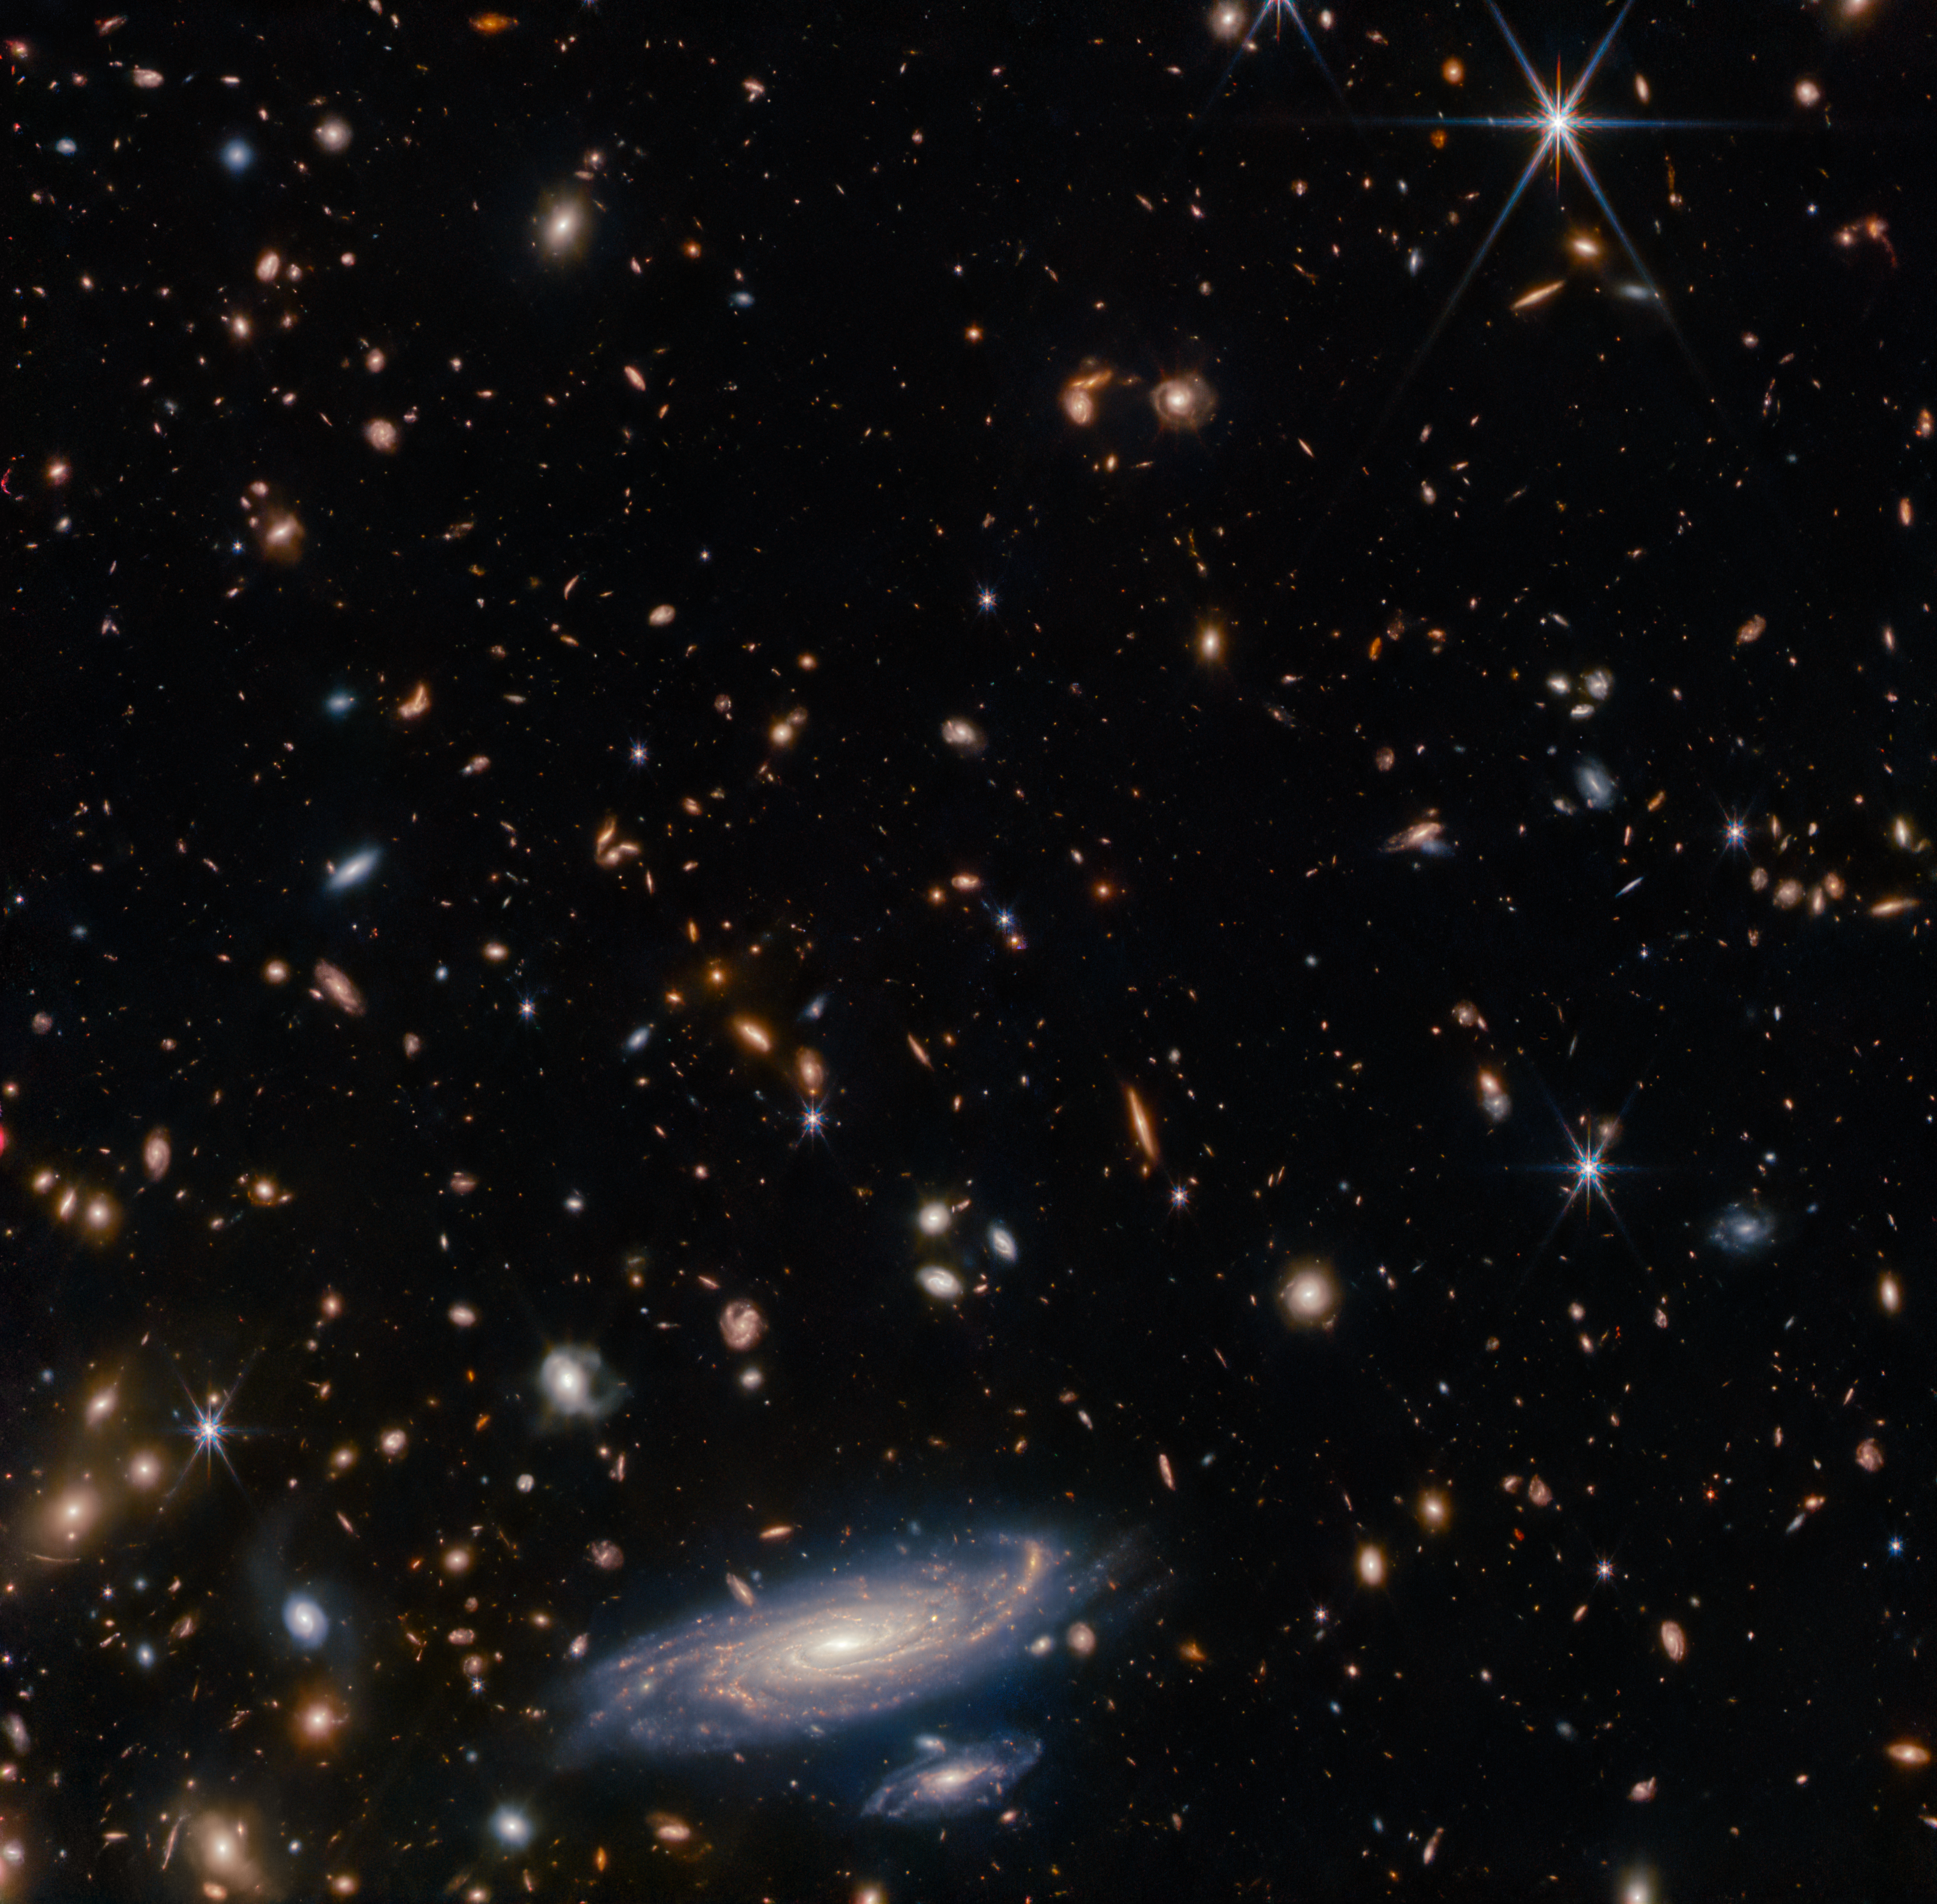

A Spiral Amongst Thousands

This image displays a wider view of the field of stars and galaxies surrounding the spiral galaxy LEDA 2046648. Webb’s NIRCam instrument has picked out a profusion of smaller, more distant galaxies and bright stars around this galaxy, demonstrating the telescope’s impressive resolution in infrared wavelengths. Calibration images such as this one were critical to verify the telescope’s capabilities as it was prepared for science operations, and this one doesn’t disappoint.

Credit: ESA/Webb, NASA & CSA, A. Martel